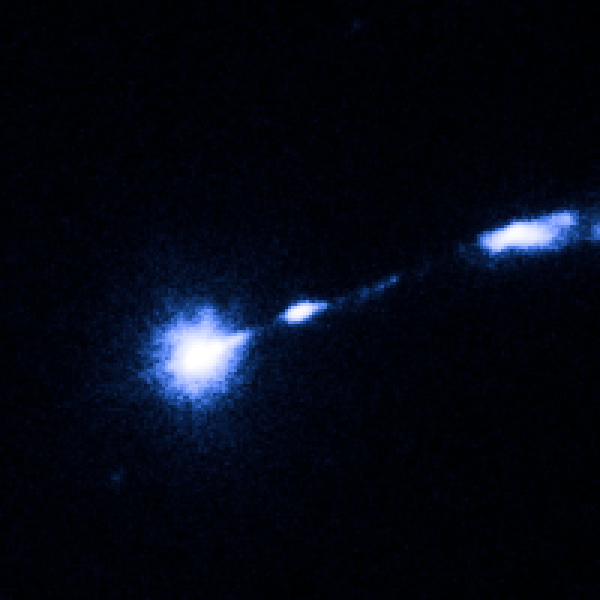

M87 nucleus and bright knot

Image taken on 17 May 1999.

Credit: NASA, ESA and J. Madrid (McMaster University, Canada)